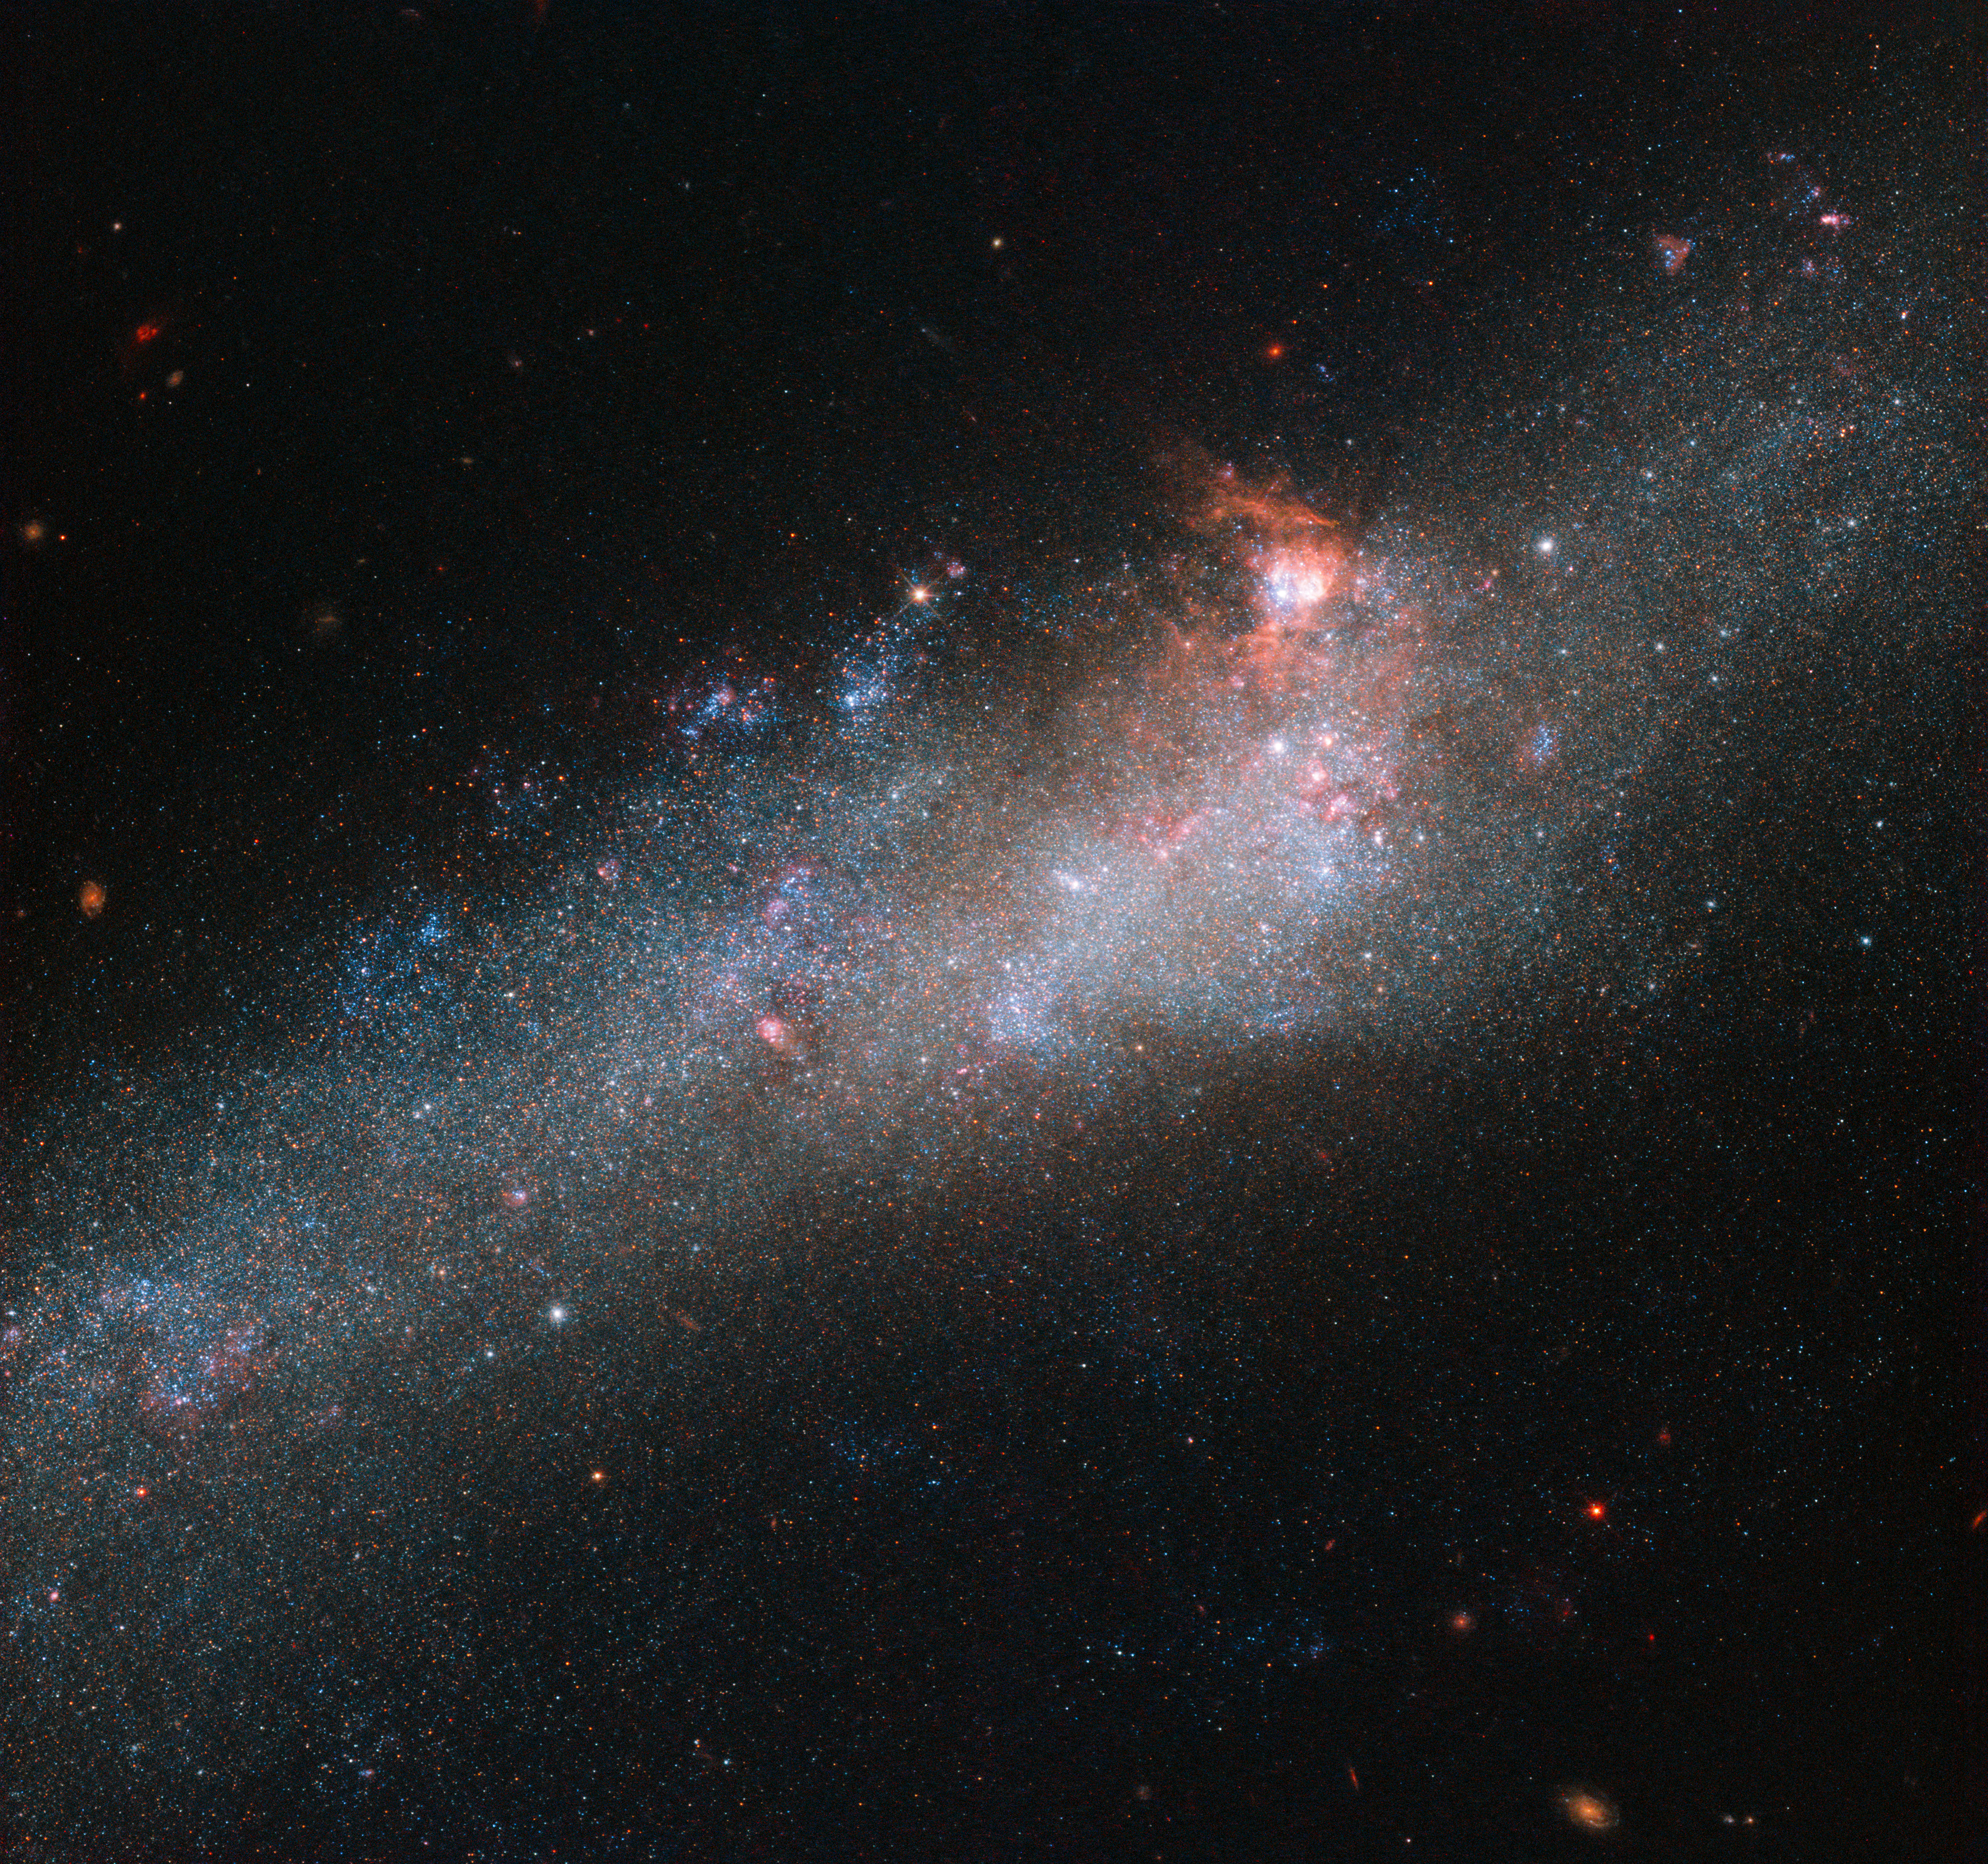

The Hockey Stick Galaxy

The star of this Hubble Picture of the Week is a galaxy known as NGC 4656, located in the constellation of Canes Venatici (The Hunting Dogs). However, it also has a somewhat more interesting and intriguing name: the Hockey Stick Galaxy! The reason for this is a little unclear from this partial view, which shows the bright central region, but the galaxy is actually shaped like an elongated, warped stick, stretching out through space until it curls around at one end to form a striking imitation of a celestial hockey stick.

This unusual shape is thought to be due to an interaction between NGC 4656 and a couple of near neighbours, NGC 4631 (otherwise known as The Whale Galaxy) and NGC 4627 (a small elliptical). Galactic interactions can completely reshape a celestial object, shifting and warping its constituent gas, stars, and dust into bizarre and beautiful configurations. The NASA/ESA Hubble Space Telescope has spied a large number of interacting galaxies over the years, from the cosmic rose of Arp 273 to the egg-penguin duo of Arp 142 and the pinwheel swirls of Arp 240. More Hubble images of interacting galaxies can be seen here.

Credit: ESA/Hubble & NASA